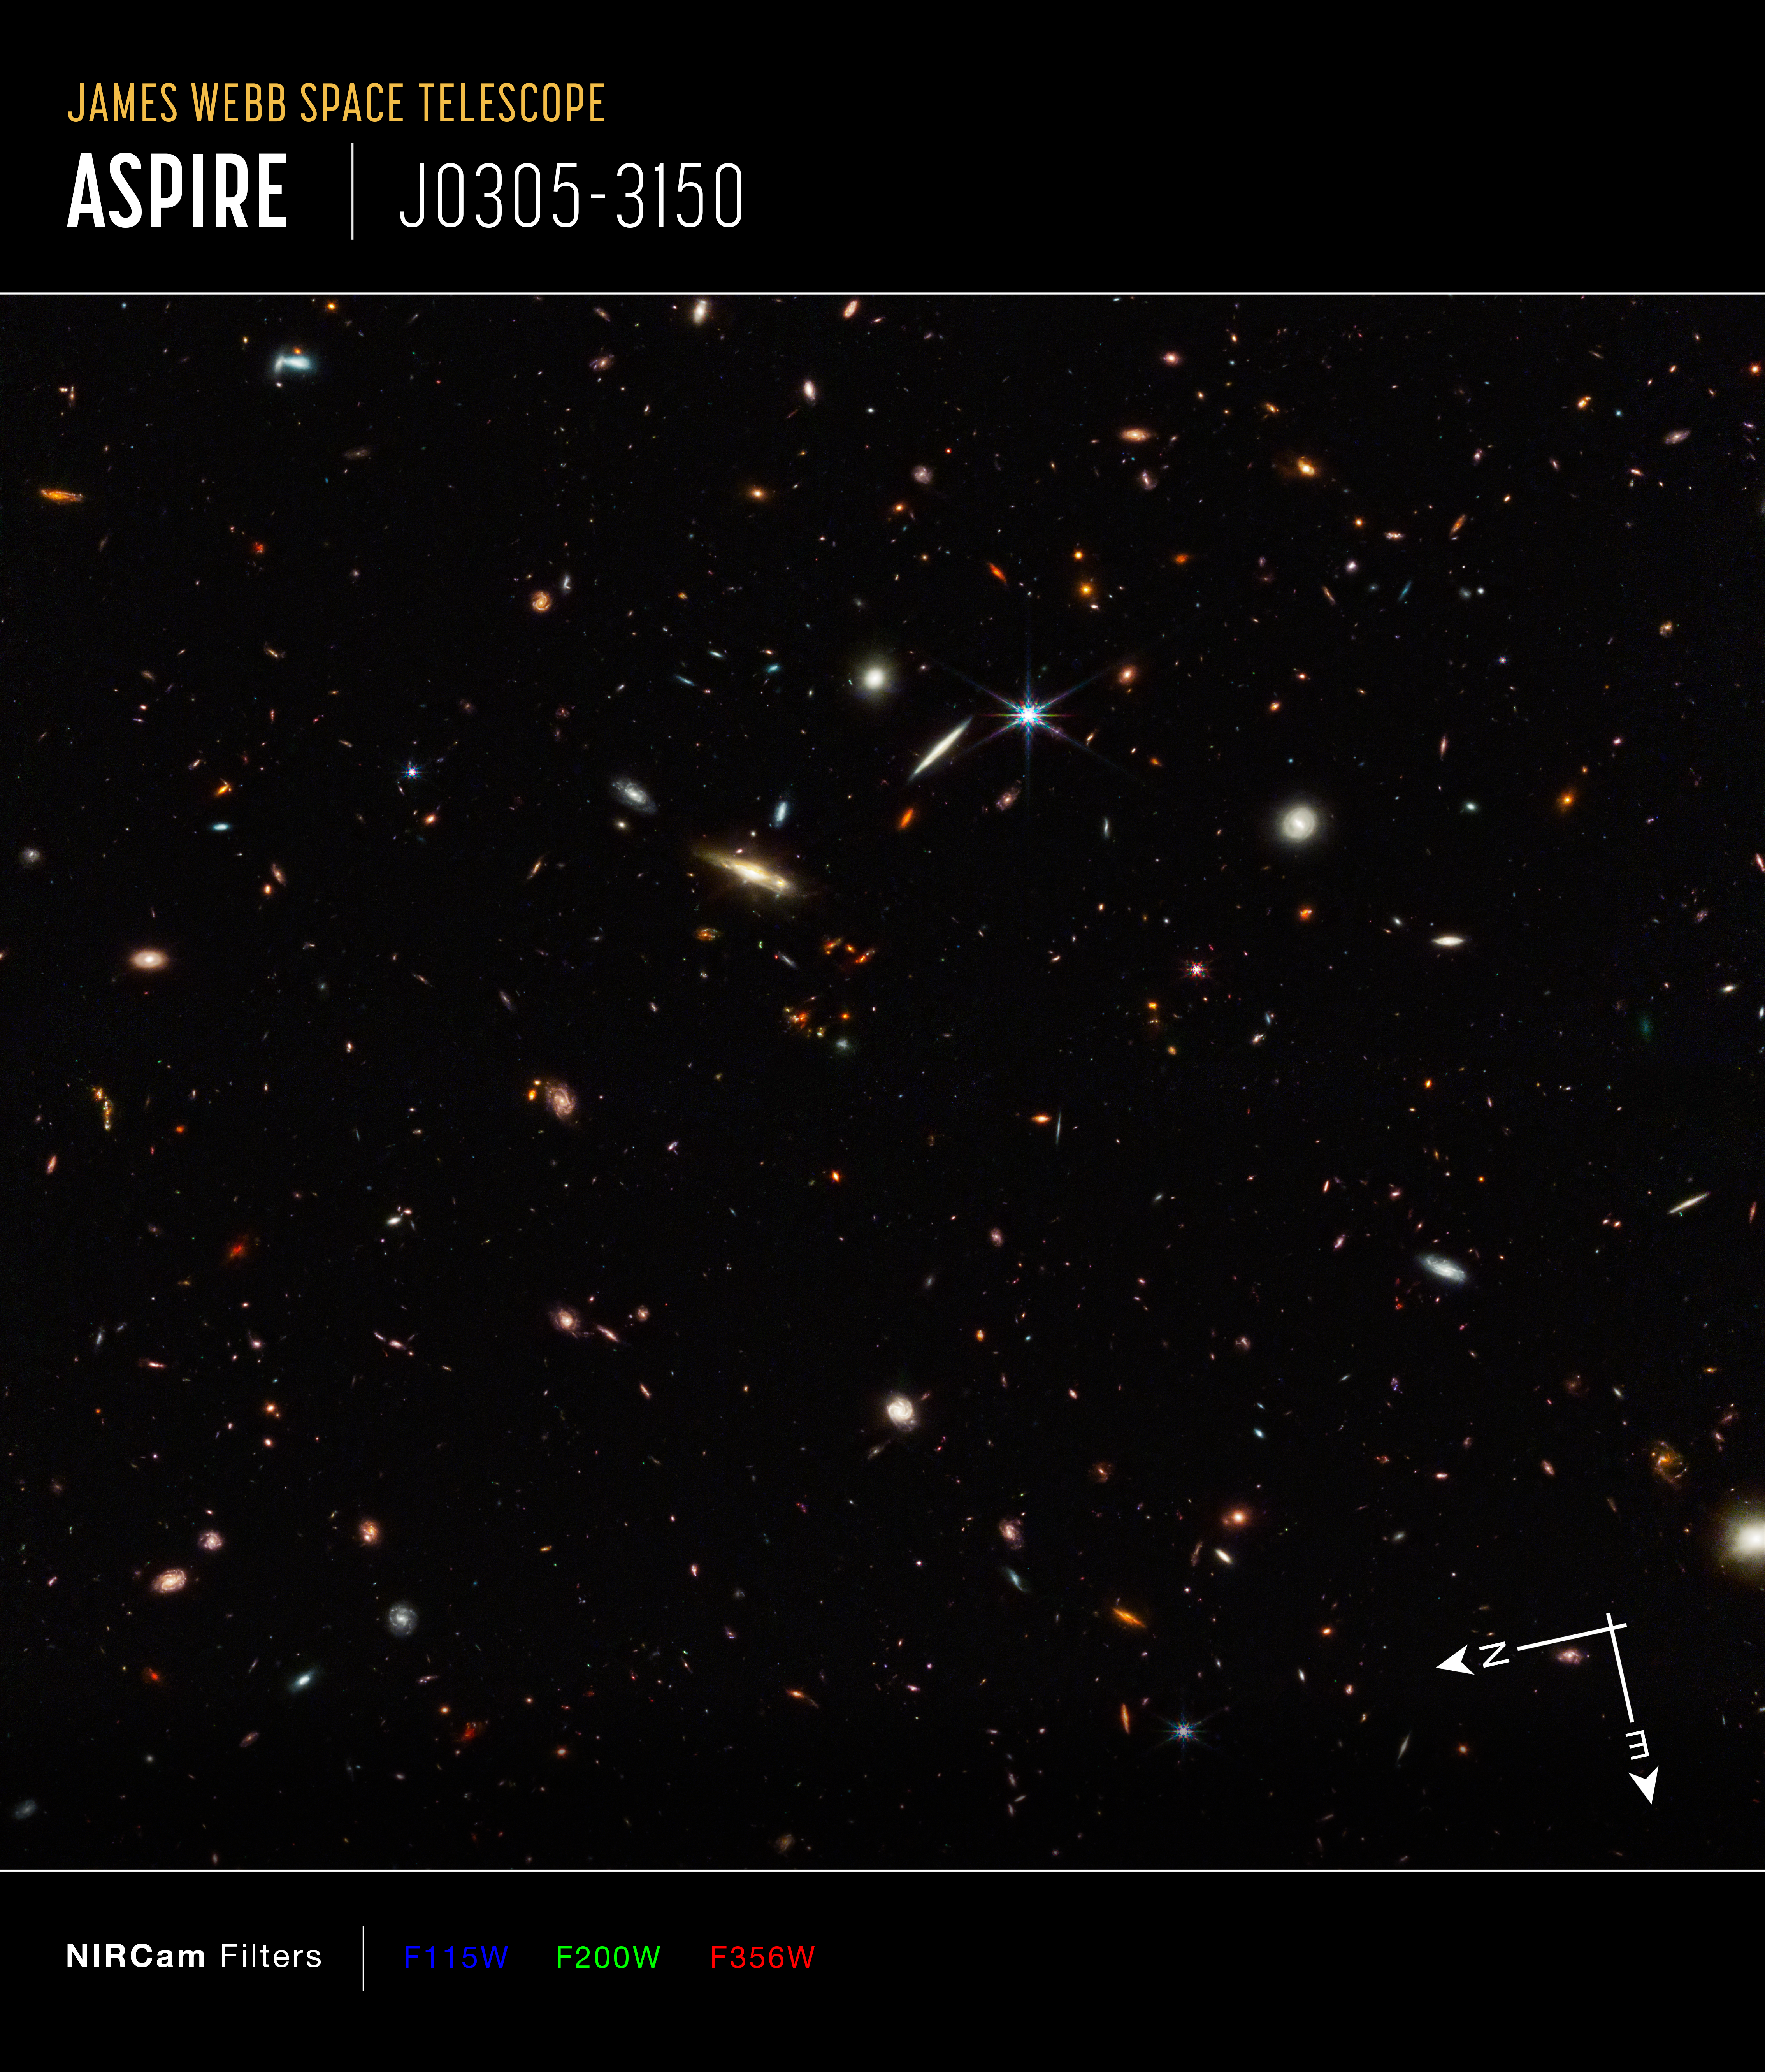

Webb identifies the earliest strands of the cosmic web (annotated)

Galaxies are not scattered randomly across the universe. They gather together not only into clusters, but into vast interconnected filamentary structures with gigantic barren voids in between. This “cosmic web” started out tenuous and became more distinct over time as gravity drew matter together.

Astronomers for the ASPIRE program using the NASA/ESA/CSA James Webb Space Telescope have discovered a thread-like arrangement of 10 galaxies that existed just 830 million years after the Big Bang. This deep galaxy field from Webb’s NIRCam (Near-Infrared Camera) hosts these 10 distant galaxies. This 3 million light-year-long filament is anchored by a very distant and luminous quasar – a galaxy with an active, supermassive black hole at its core. The quasar, called J0305-3150, on the right side of the image, outshines its host galaxy. These 10 galaxies existed just 830 million years after the big bang. The team believes the filament will eventually evolve into a massive cluster of galaxies.

These results were published in two papers in The Astrophysical Journal Letters on 29 June 2023.

Credit: NASA, ESA, CSA, F. Wang (University of Arizona)